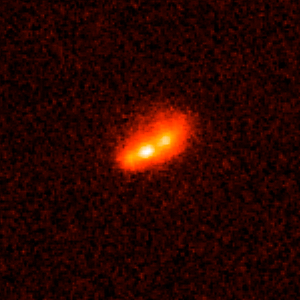

Gamma-ray burst host galaxy GRB990712

This is an image of Gamma-ray Burst Host Galaxy GRB990712. Long-duration gamma-ray bursts are powerful flashes of high-energy radiation that are sometimes seen coming from supernovae — the explosions of extremely massive stars. This image is one of a set of images taken by NASA’s Hubble Space Telescope which show the galaxies that host these bursts and could help to tell us more about their cause.

Credit: NASA, ESA, A. Fruchter (STScI), and the GOSH Collaboration